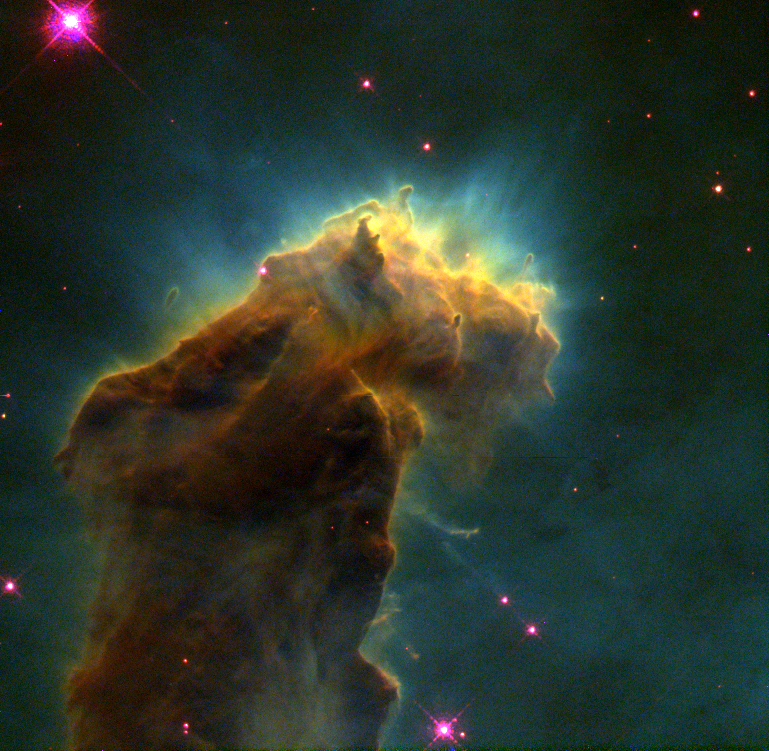

The Eagle Nebula

This eerie, dark structure, resembling an imaginary sea serpent's head, is a column of cool molecular hydrogen gas (two atoms of hydrogen in each molecule) and dust that is an incubator for new stars. The stars are embedded inside finger-like protrusions extending from the top of the nebula. Each 'fingertip' is somewhat larger than our own solar system.

Credit: Jeff Hester and Paul Scowen (Arizona State University), and NASA/ESA